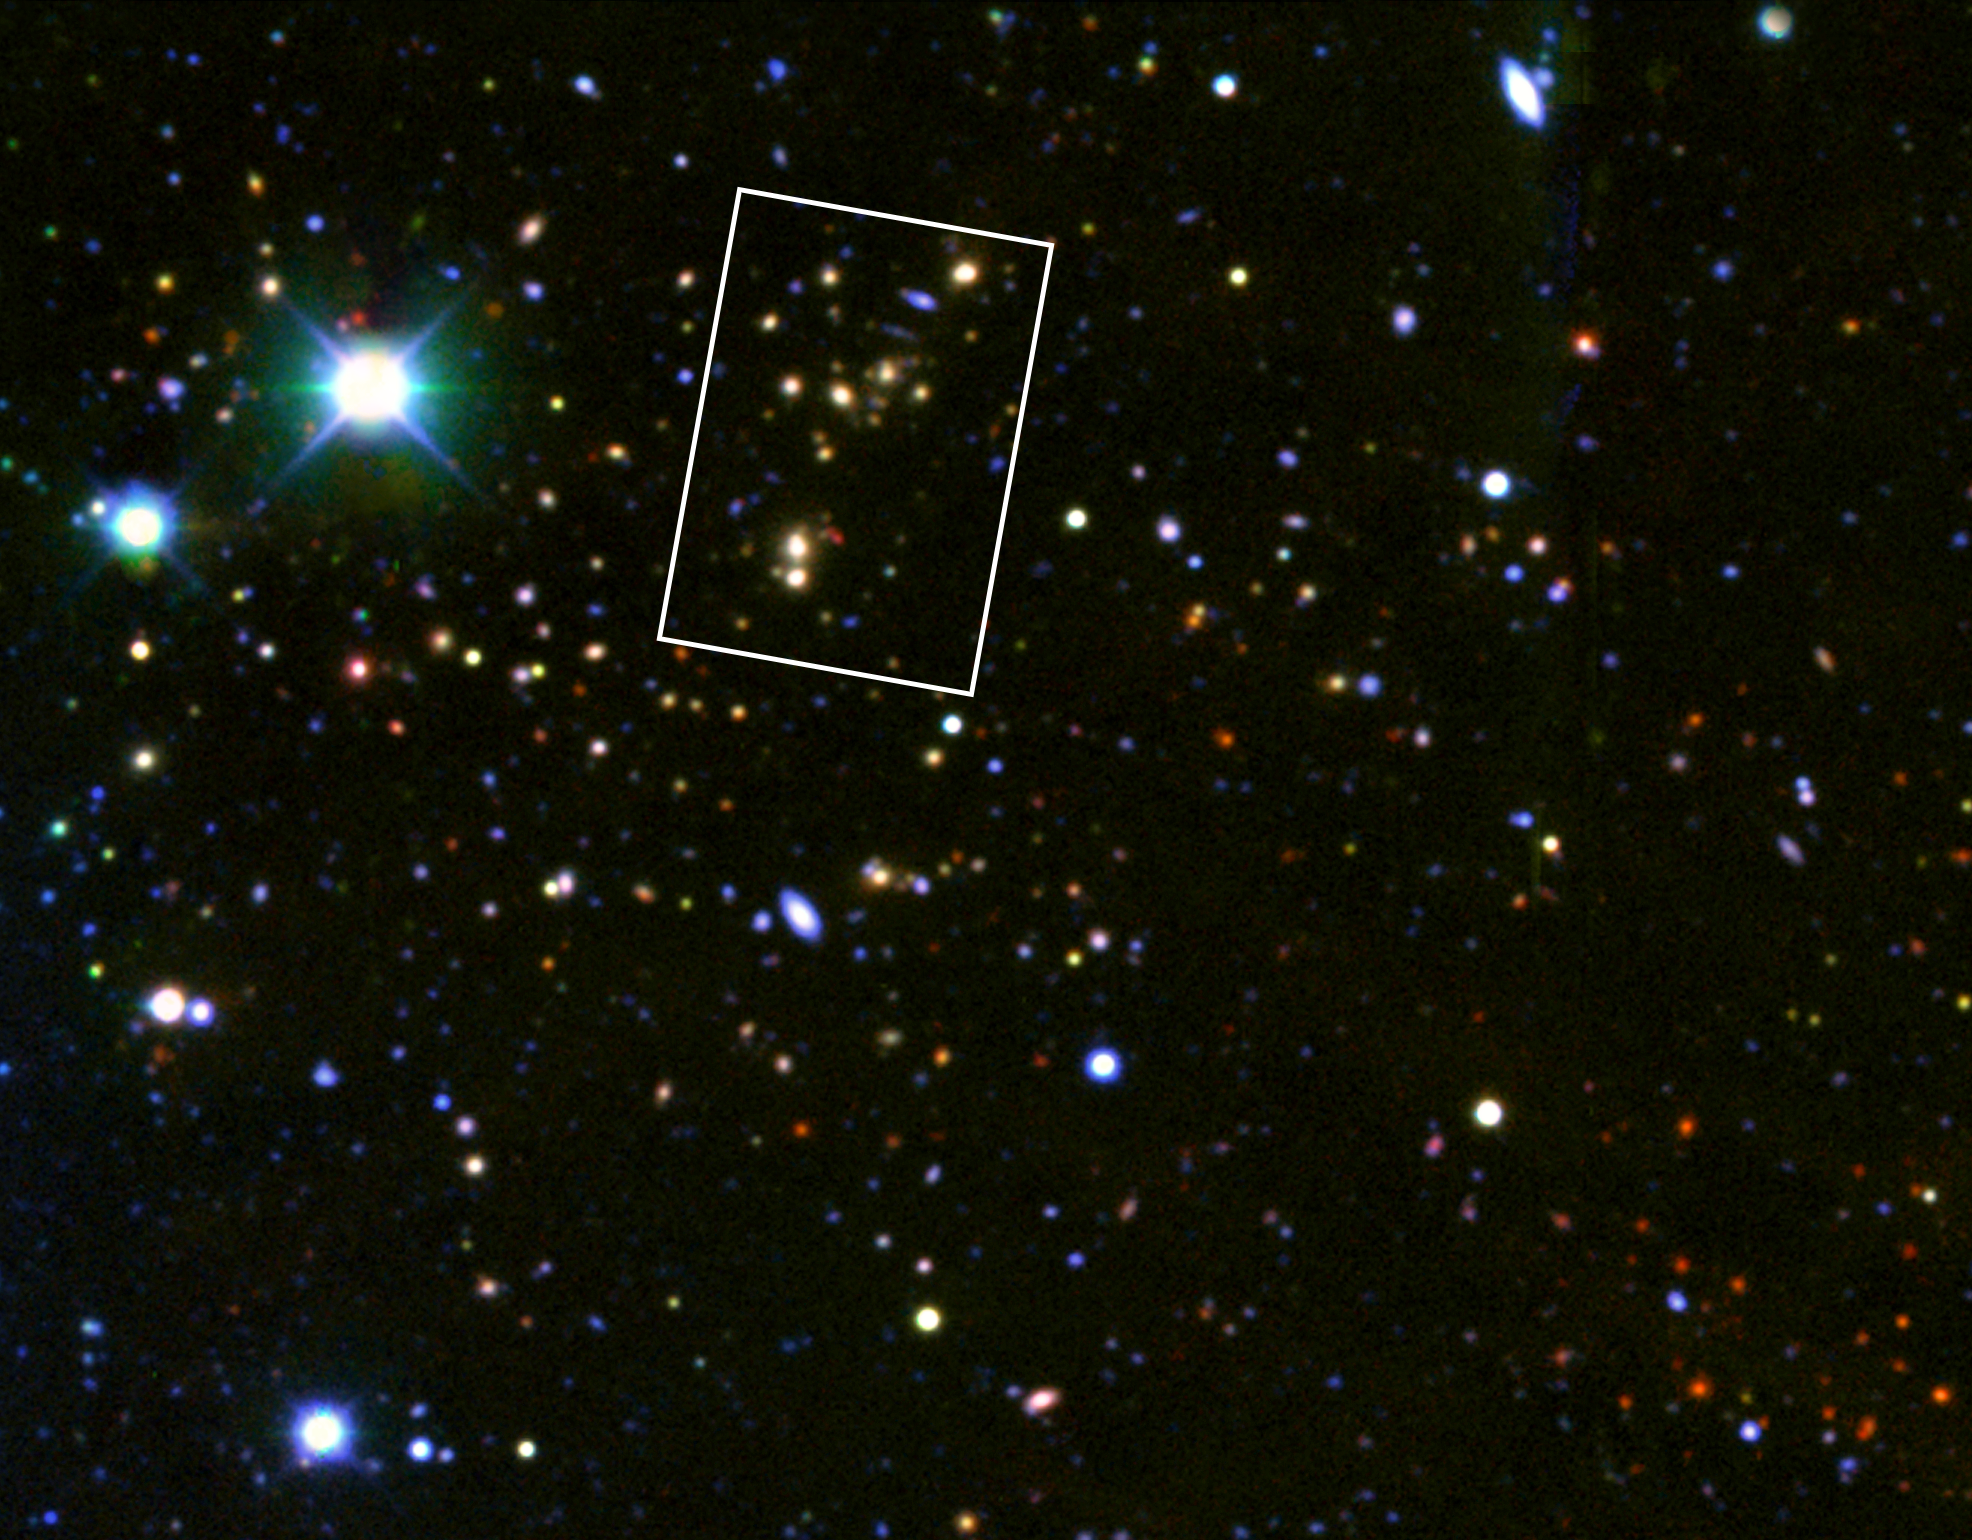

The Lynx Cluster (ground-based view, Kitt Peak)

This ground-based view shows a 0.09 x 0.07 degree field around the Lynx cluster of galaxies (the yellow galaxies above and to the left of the centre). The Lynx Arc is visible as a red object. This image was composed from six ground-based images (BRIzJK) from the blue to the infrared taken with the Mayall 4-m Telescope at NOAO's Kitt Peak Observatory in Arizona, USA. The frame shows the outline of the Hubble Wide Field and Planetary Camera 2image.

Credit: European Space Agency, NASA, Robert A.E. Fosbury (European Space Agency/Space Telescope-European Coordinating Facility, Germany) and NOAO